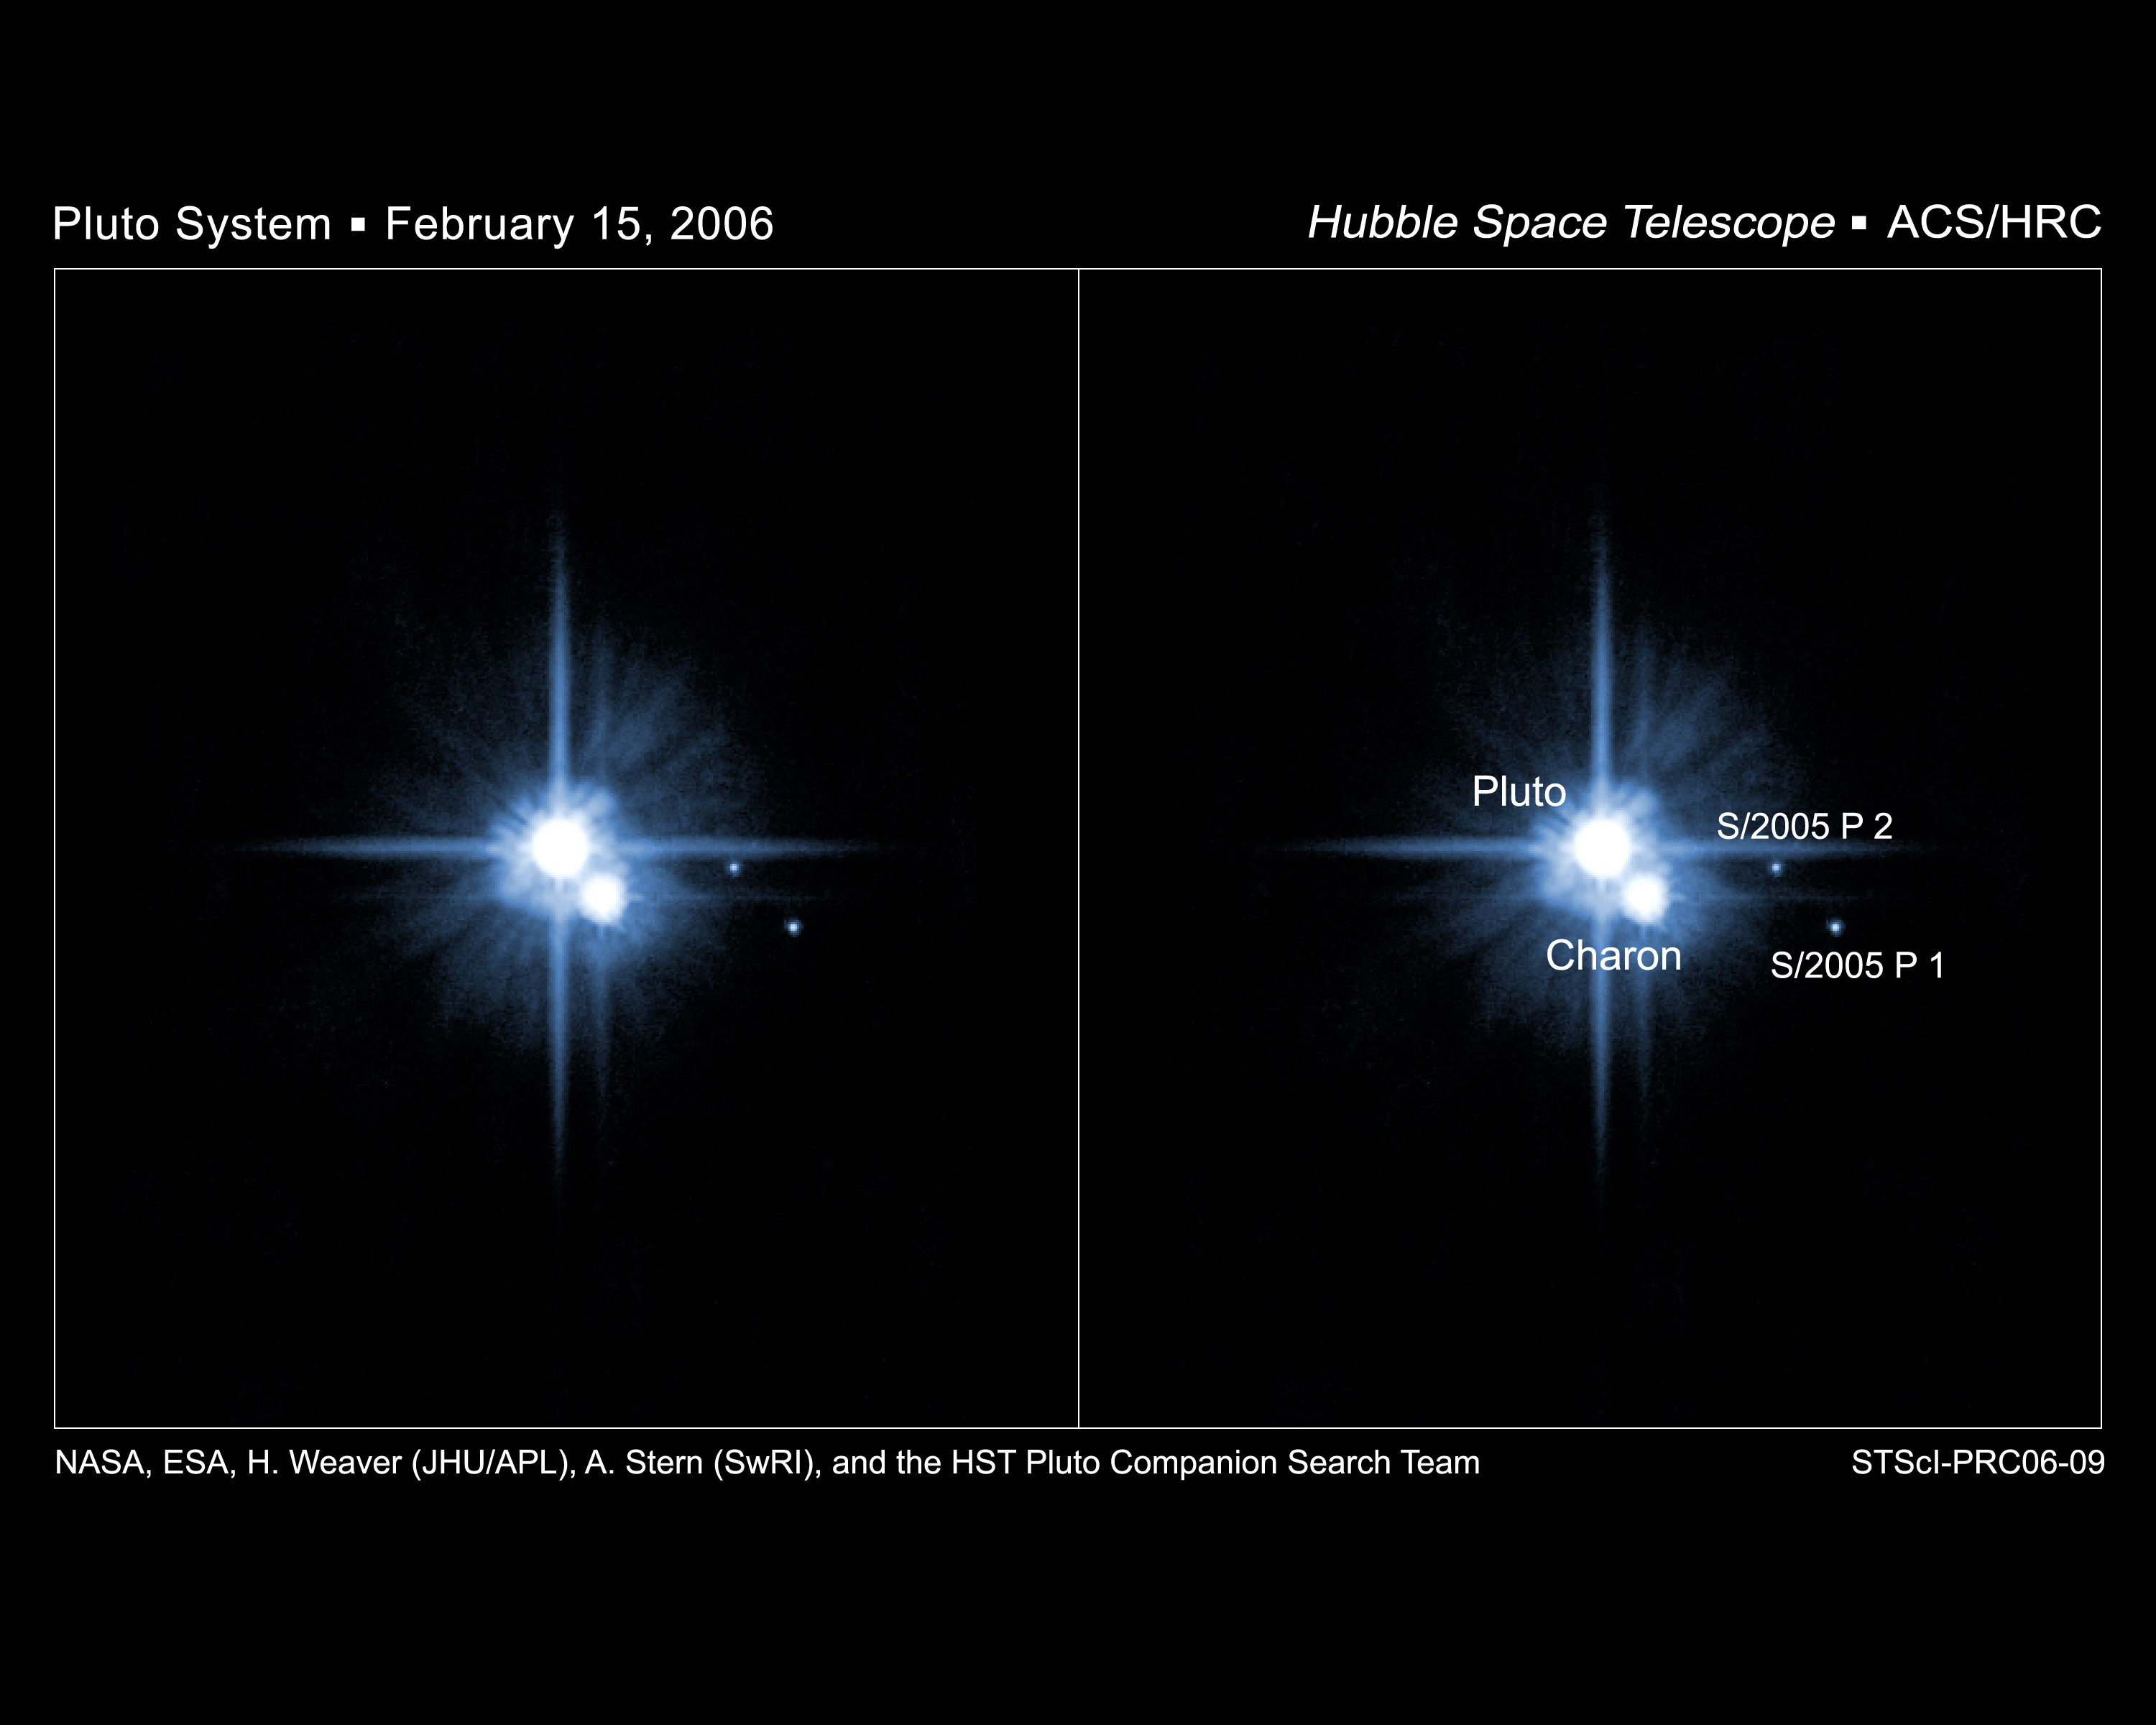

Hubble Confirms New Moons of Pluto

Anxiously awaited follow-up observations with the NASA/ESA Hubble Space Telescope have confirmed the presence of two new moons around the distant planet Pluto. The moons were first discovered by Hubble in May 2005, but the science team probed even deeper into the Pluto system last week to look for additional satellites and to characterize the orbits of the moons.

Credit: NASA, ESA, H. Weaver (JHU/APL), A. Stern (SwRI), and the HST Pluto Companion Search Team